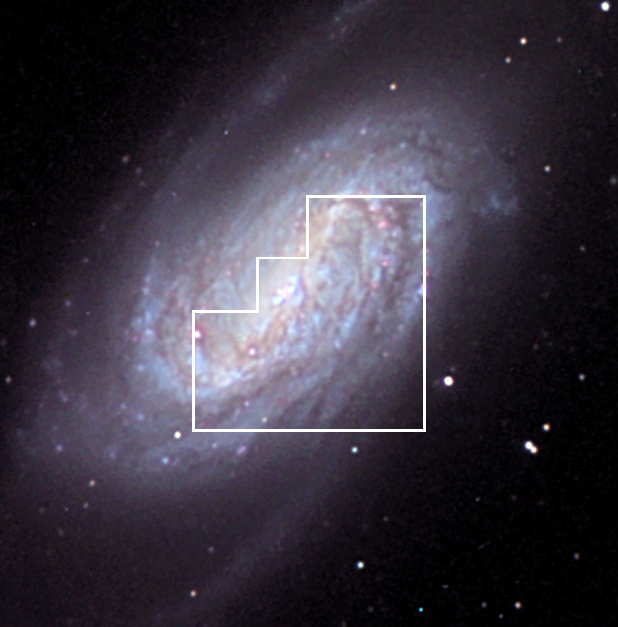

Overview of NGC 2903 (ground-based)

This ground-based overview image of NGC 2903 was taken with a 40 cm telescope (16 inch), and shows why this spiral galaxy is a favourite among amateur astronomers. The area viewed in detail by Hubble's WFPC2 camera is shown as an outline. Massive spiral arms are connected to the spiral's bar. The image is combined from 4 exposures totalling 88 minutes.

Credit: Ryan Branch and Robin Milner/Adam Block/AURA/NOAO/NSF